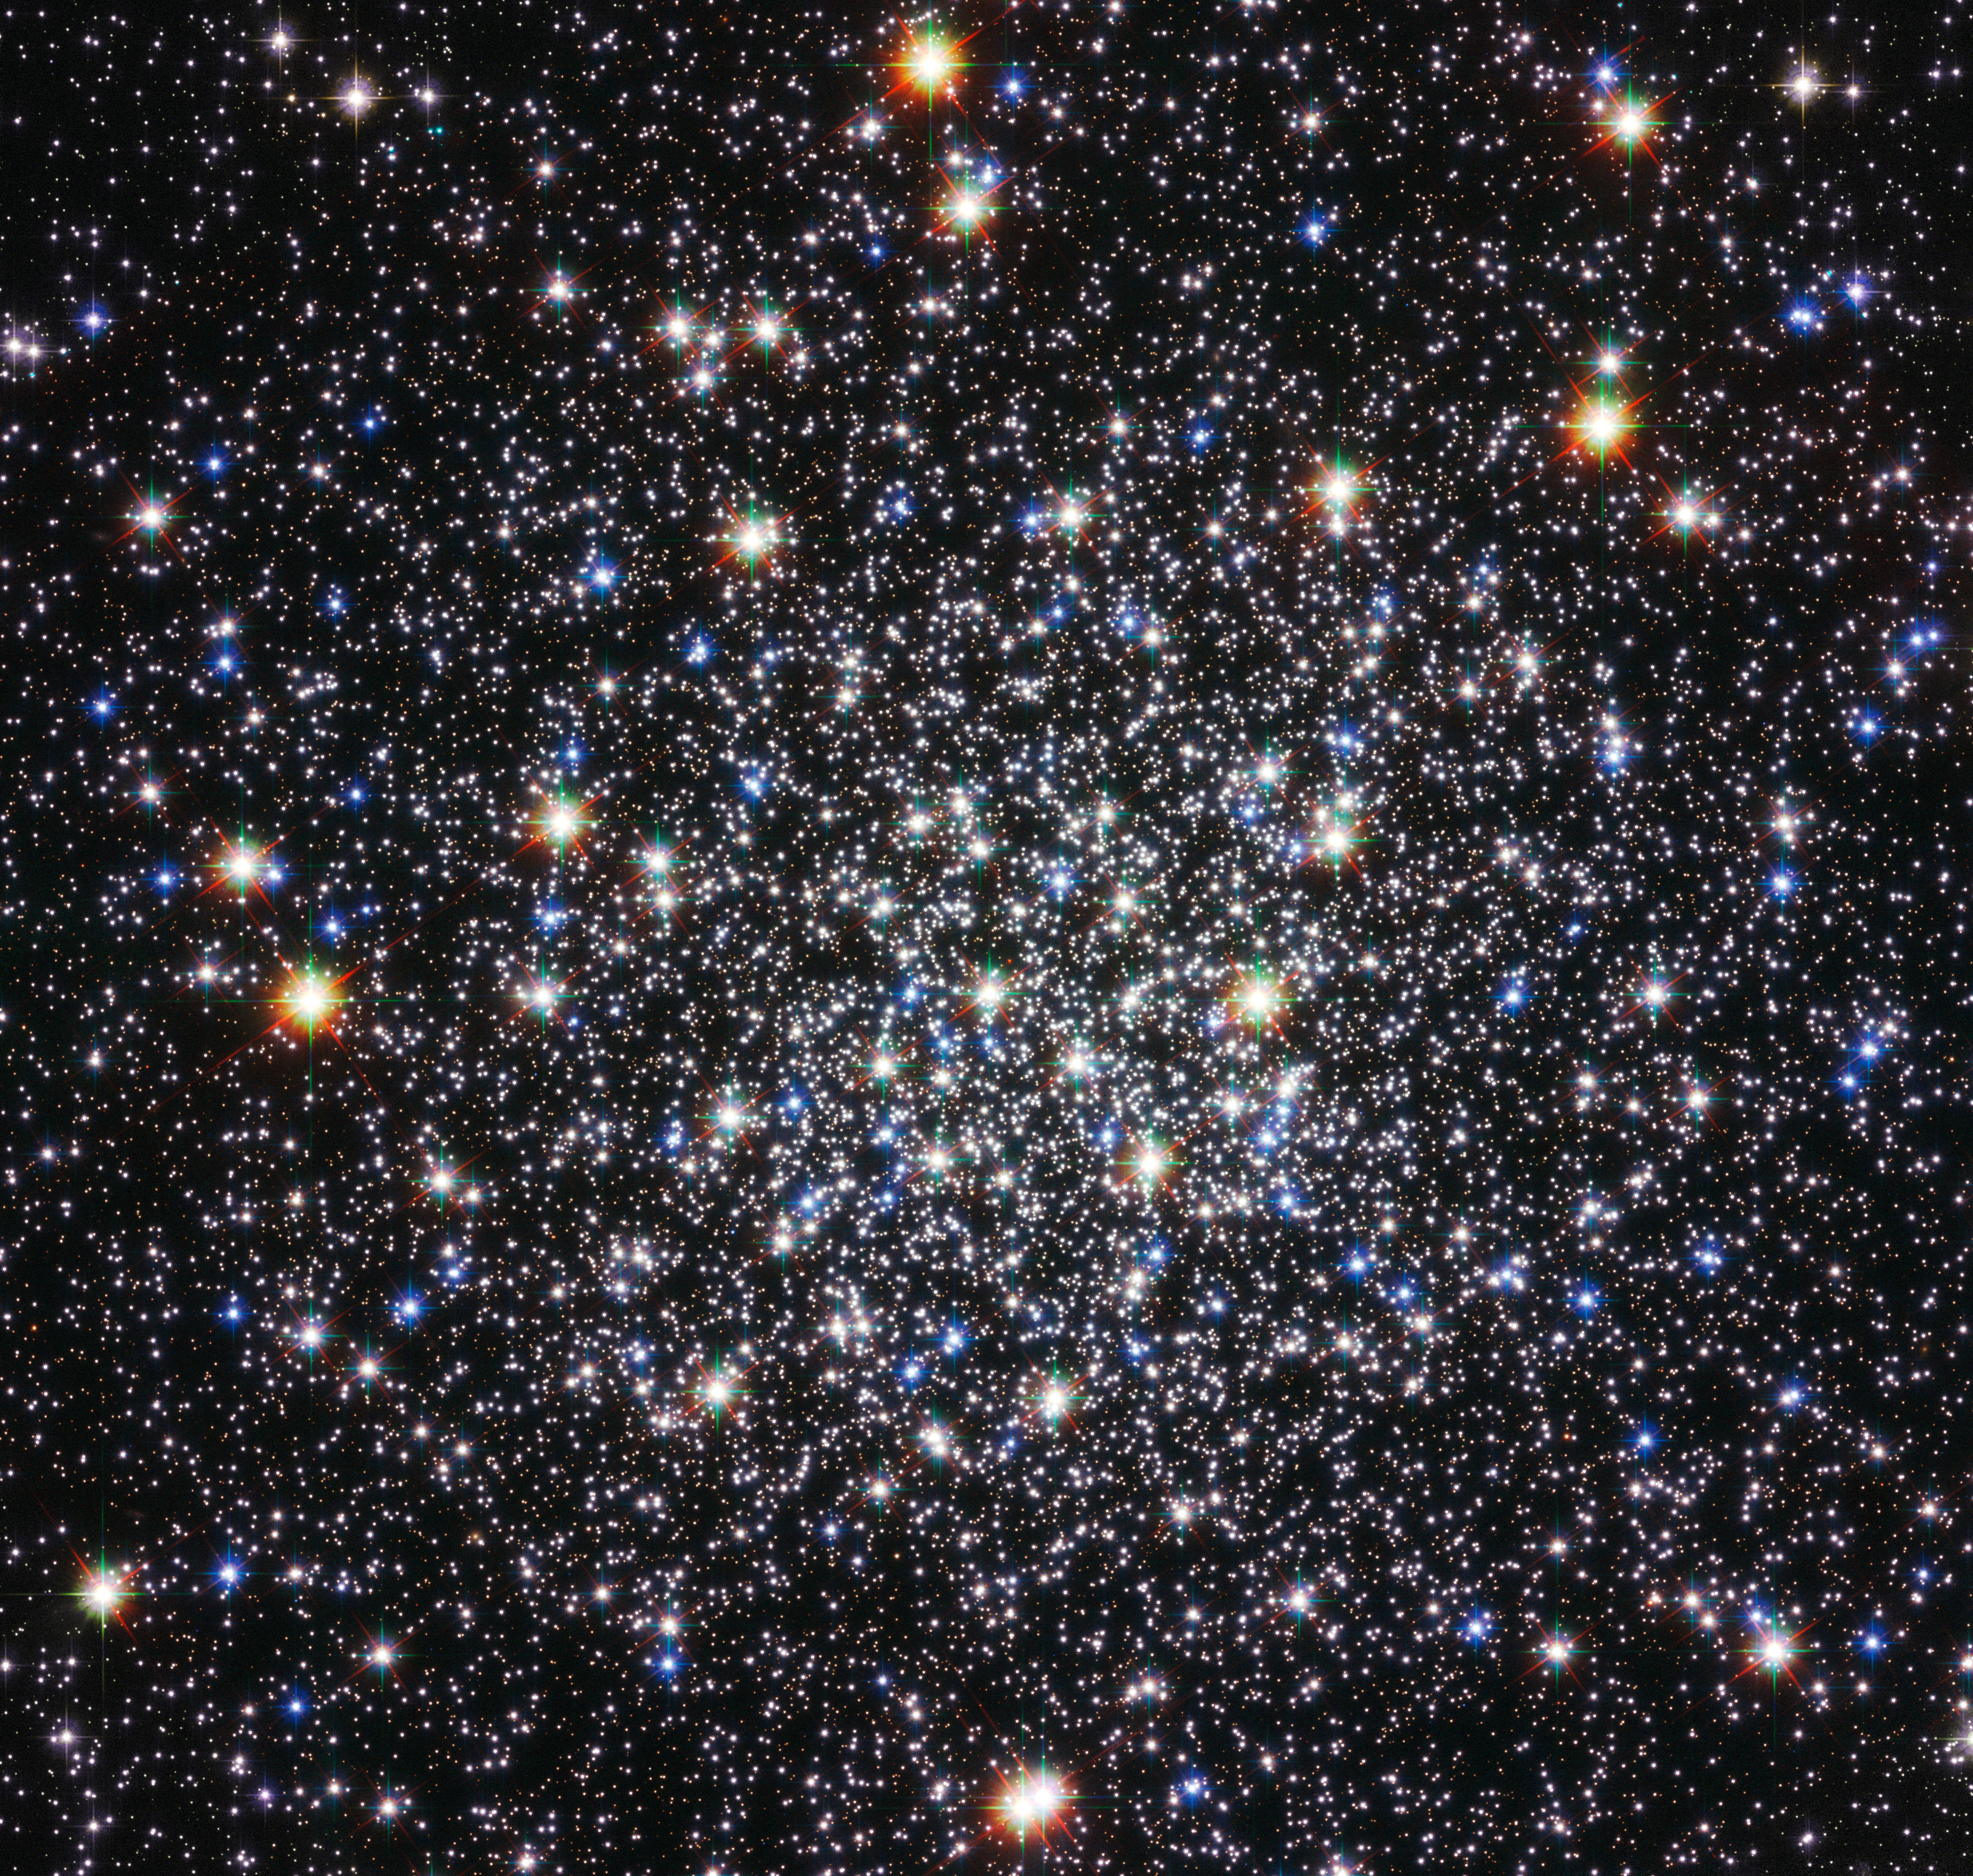

Cluster’s deceptive serenity hides violent past

The high concentration of stars within globular clusters, like Messier 12, shown here in an image from the NASA/ESA Hubble Space Telescope, makes them beautiful photographic targets. But the cramped living quarters in these clusters also makes them home to exotic binary star systems where two stars are locked in tight orbits around each other and matter from one is gobbled up by its companion, releasing X-rays. It is thought that such X-ray binaries form from very close encounters between stars in crowded regions, such as globular clusters, and even though Messier 12 is fairly diffuse by globular cluster standards, such X-ray sources have been spotted there.

Astronomers have also discovered that Messier 12 is home to far fewer low-mass stars than was previously expected (eso0604). In a recent study, astronomers used the European Southern Observatory’s Very Large Telescope at Cerro Paranal, Chile, to measure the brightness and colours of more than 16 000 of the globular’s 200 000 stars. They speculate that nearly one million low-mass stars have been ripped away from Messier 12 as the globular has passed through the densest regions of the Milky Way during its orbit around the galactic centre.

It seems that the serenity of this view of Messier 12 is misleading and the object has had a violent and disturbed past.

Messier 12 lies about 23 000 light-years away in the constellation of Ophiuchus (The Serpent Bearer). This image was taken using the Wide Field Channel of Hubble’s Advanced Camera for Surveys. The colour image was created from exposures through a blue filter (F435W, coloured blue), a red filter (F625W, coloured green) and a filter that passes near-infrared light (F814W coloured red). The total exposure times were 1360 s, 200 s and 364 s, respectively. The field of view is about 3.2 x 3.1 arcminutes .

Credit: ESA/Hubble & NASA